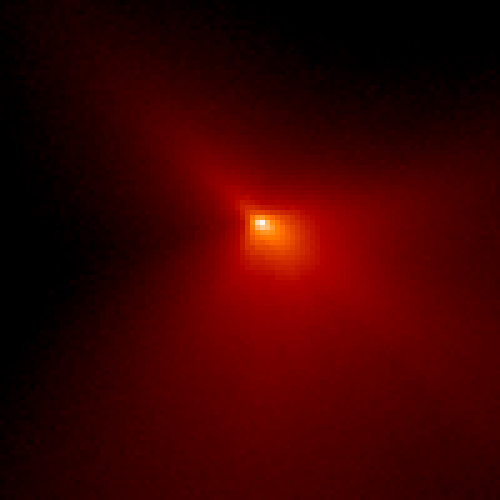

Inner Region of Comet Hyakutake

This expanded view of the near-nucleus region is only 470 miles (760 km) across. The nucleus is near the center of the frame, but the brightest area is probably the tip of the strongest dust jet rather than the nucleus itself.

Credit: H. A. Weaver (Applied Research Corp.), HST Comet Hyakutake Observing Team, and NASA/ESA